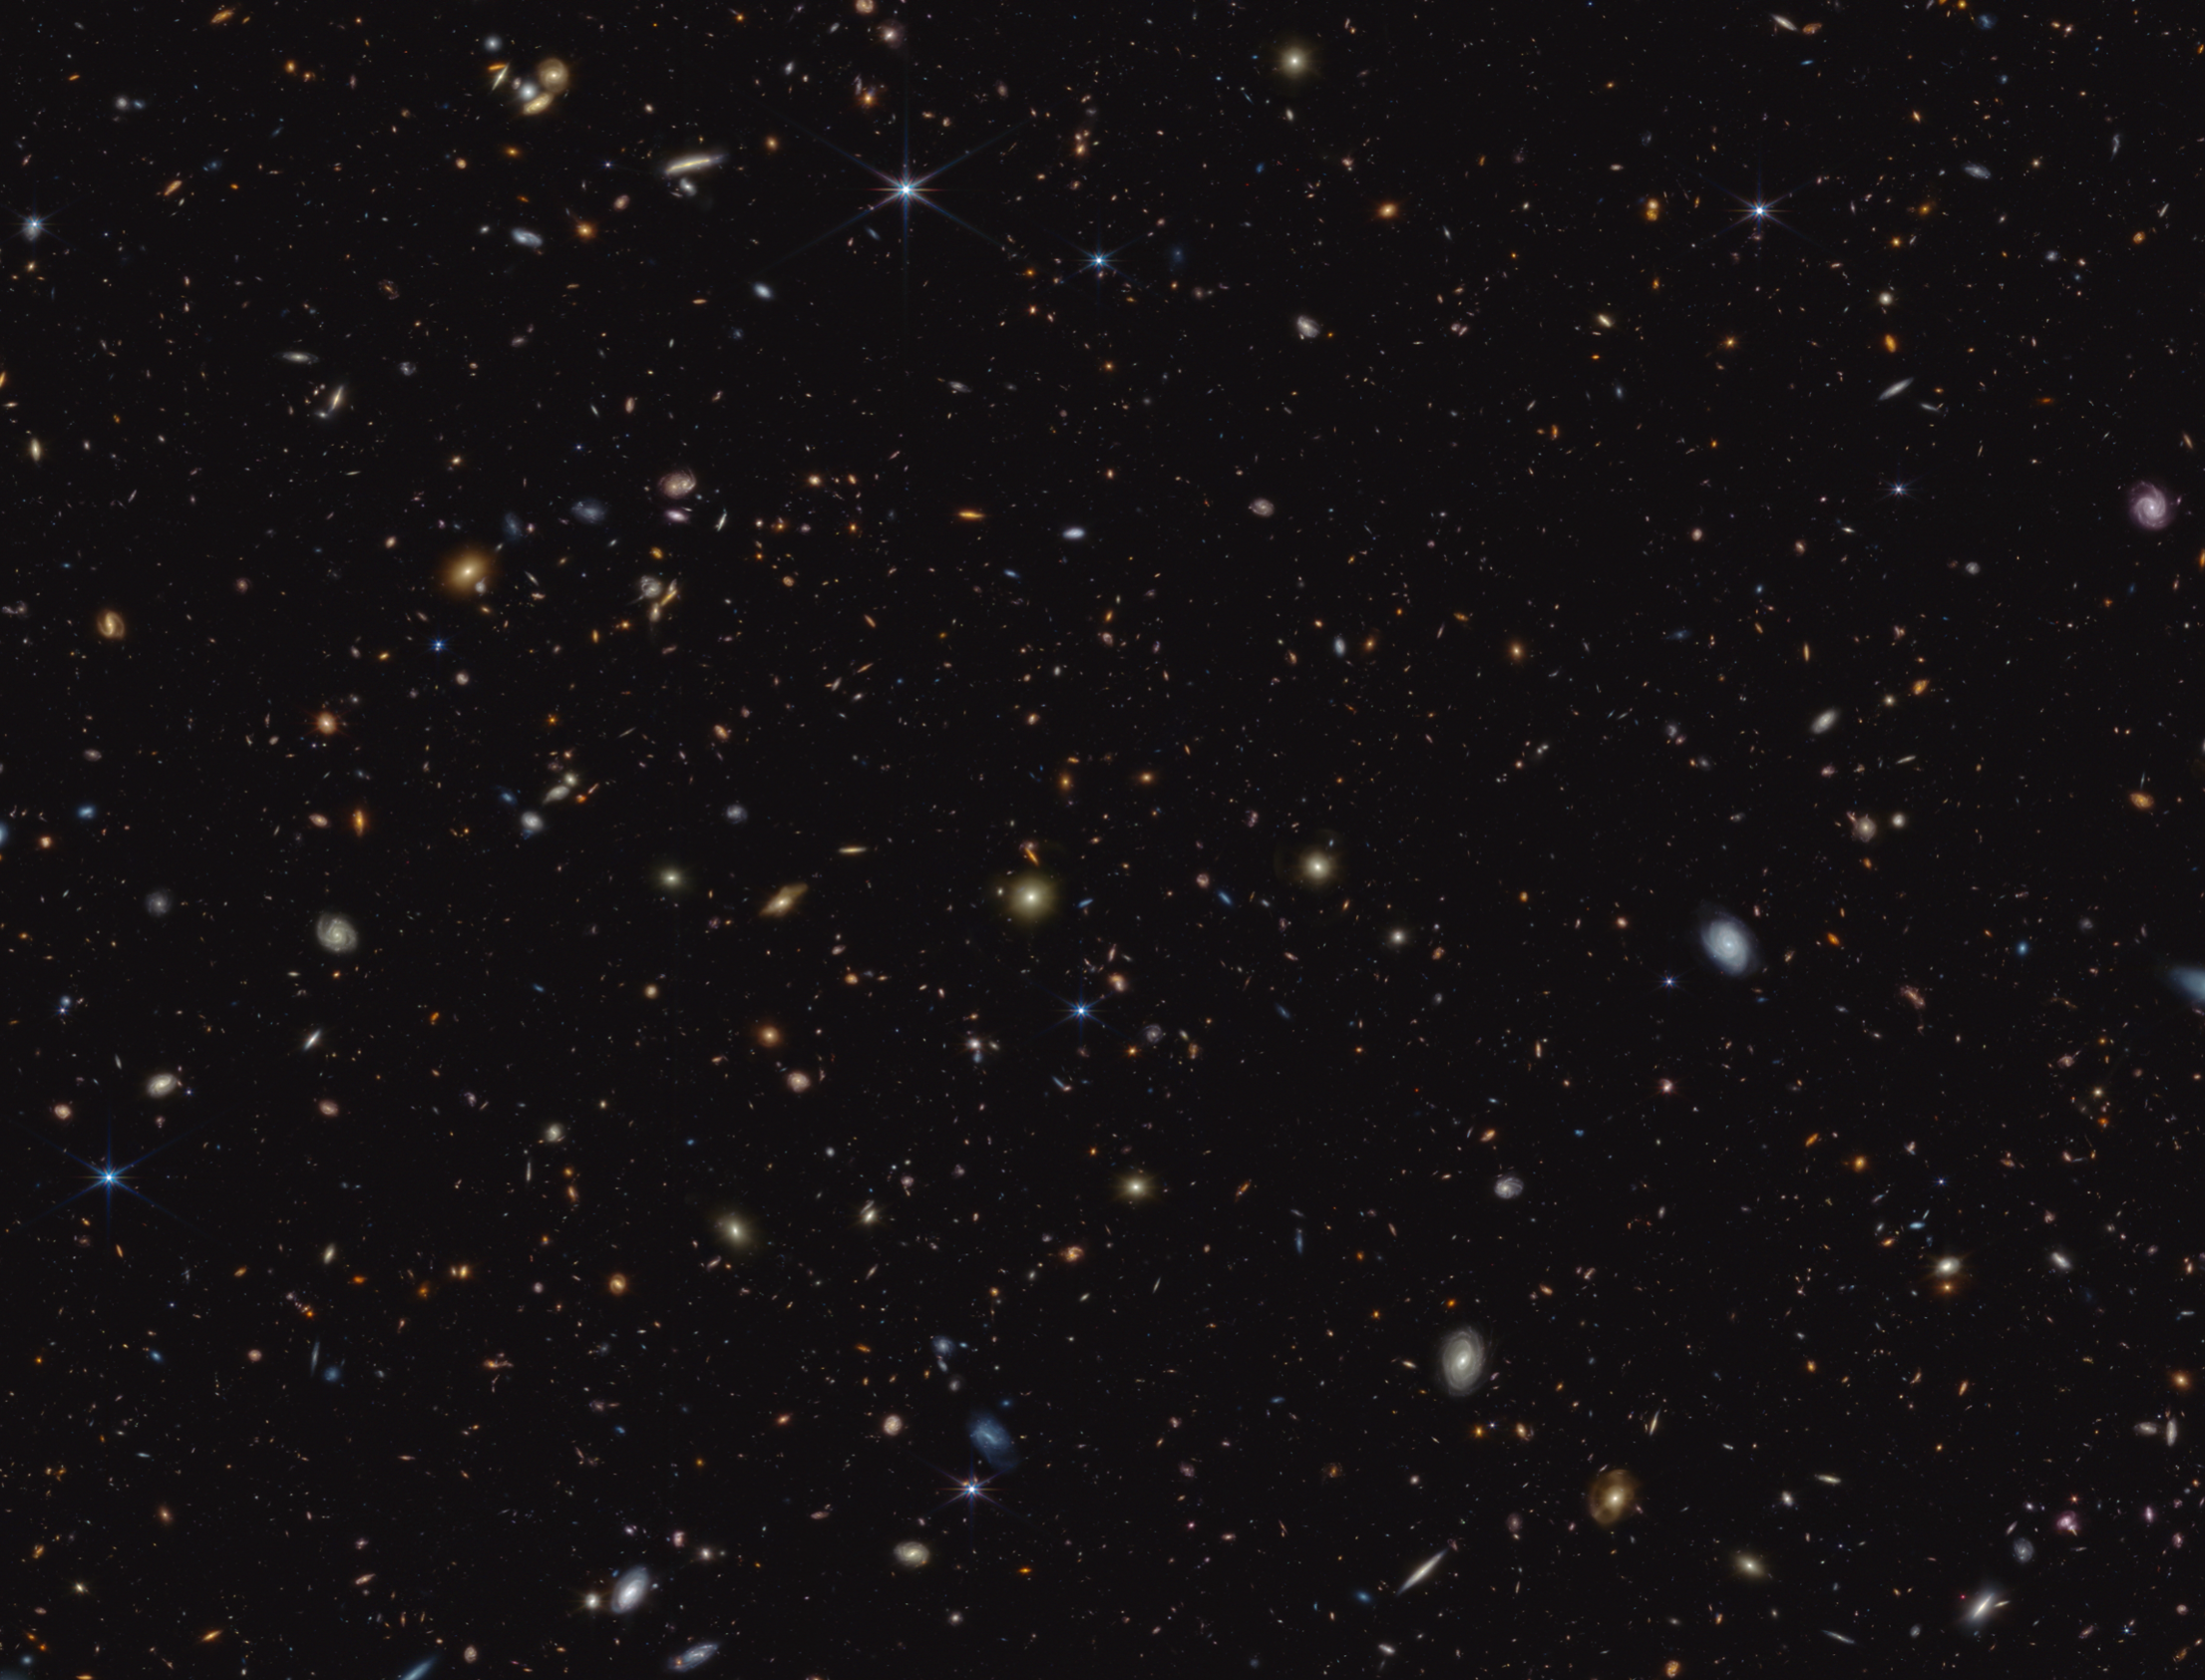

Crop of the GOODS-S field: JADES (NIRCam image, clean)

The infrared image shown here was taken as part of the JADES programme (the JWST Advanced Deep Extragalactic Survey) and shows a portion of an area of the sky known as GOODS-South.

This region was the focus area of Webb study for an international team of astronomers, who observed the chemical signature of carbon-rich dust grains at redshift ~7. This is roughly equivalent to one billion years after the birth of the Universe. Similar observational signatures have been observed in the much more recent Universe, attributed to complex, carbon-based molecules known as polycyclic aromatic hydrocarbons (PAHs). It is not thought likely, however, that PAHs would have developed within the first billion years of cosmic time. Therefore, this observation suggests the exciting possibility that Webb may have observed a different species of carbon-based molecule: possibly minuscule graphite- or diamond-like grains produced by the earliest stars or supernovae. This observation suggests exciting avenues of investigation into both the production of cosmic dust and the earliest stellar populations in our Universe, and was made possible by Webb’s unprecedented sensitivity.

In this image, blue, green, and red were assigned to Webb’s NIRCam (Near-Infrared Camera) data at 0.9, 1.15, and 1.5 microns; 2.0, 2.77, and 3.55 microns; and 3.56, 4.1, and 4.44 microns (F090W, F115W, and F150W; F200W, F277W, and F335M; and F356W, F410M, and F444W), respectively.

Credit: ESA/Webb, NASA, ESA, CSA, B. Robertson (UC Santa Cruz), B. Johnson (Center for Astrophysics, Harvard & Smithsonian), S. Tacchella (University of Cambridge, M. Rieke (Univ. of Arizona), D. Eisenstein (Center for Astrophysics, Harvard & Smithsonian), A. Pagan (STScI)